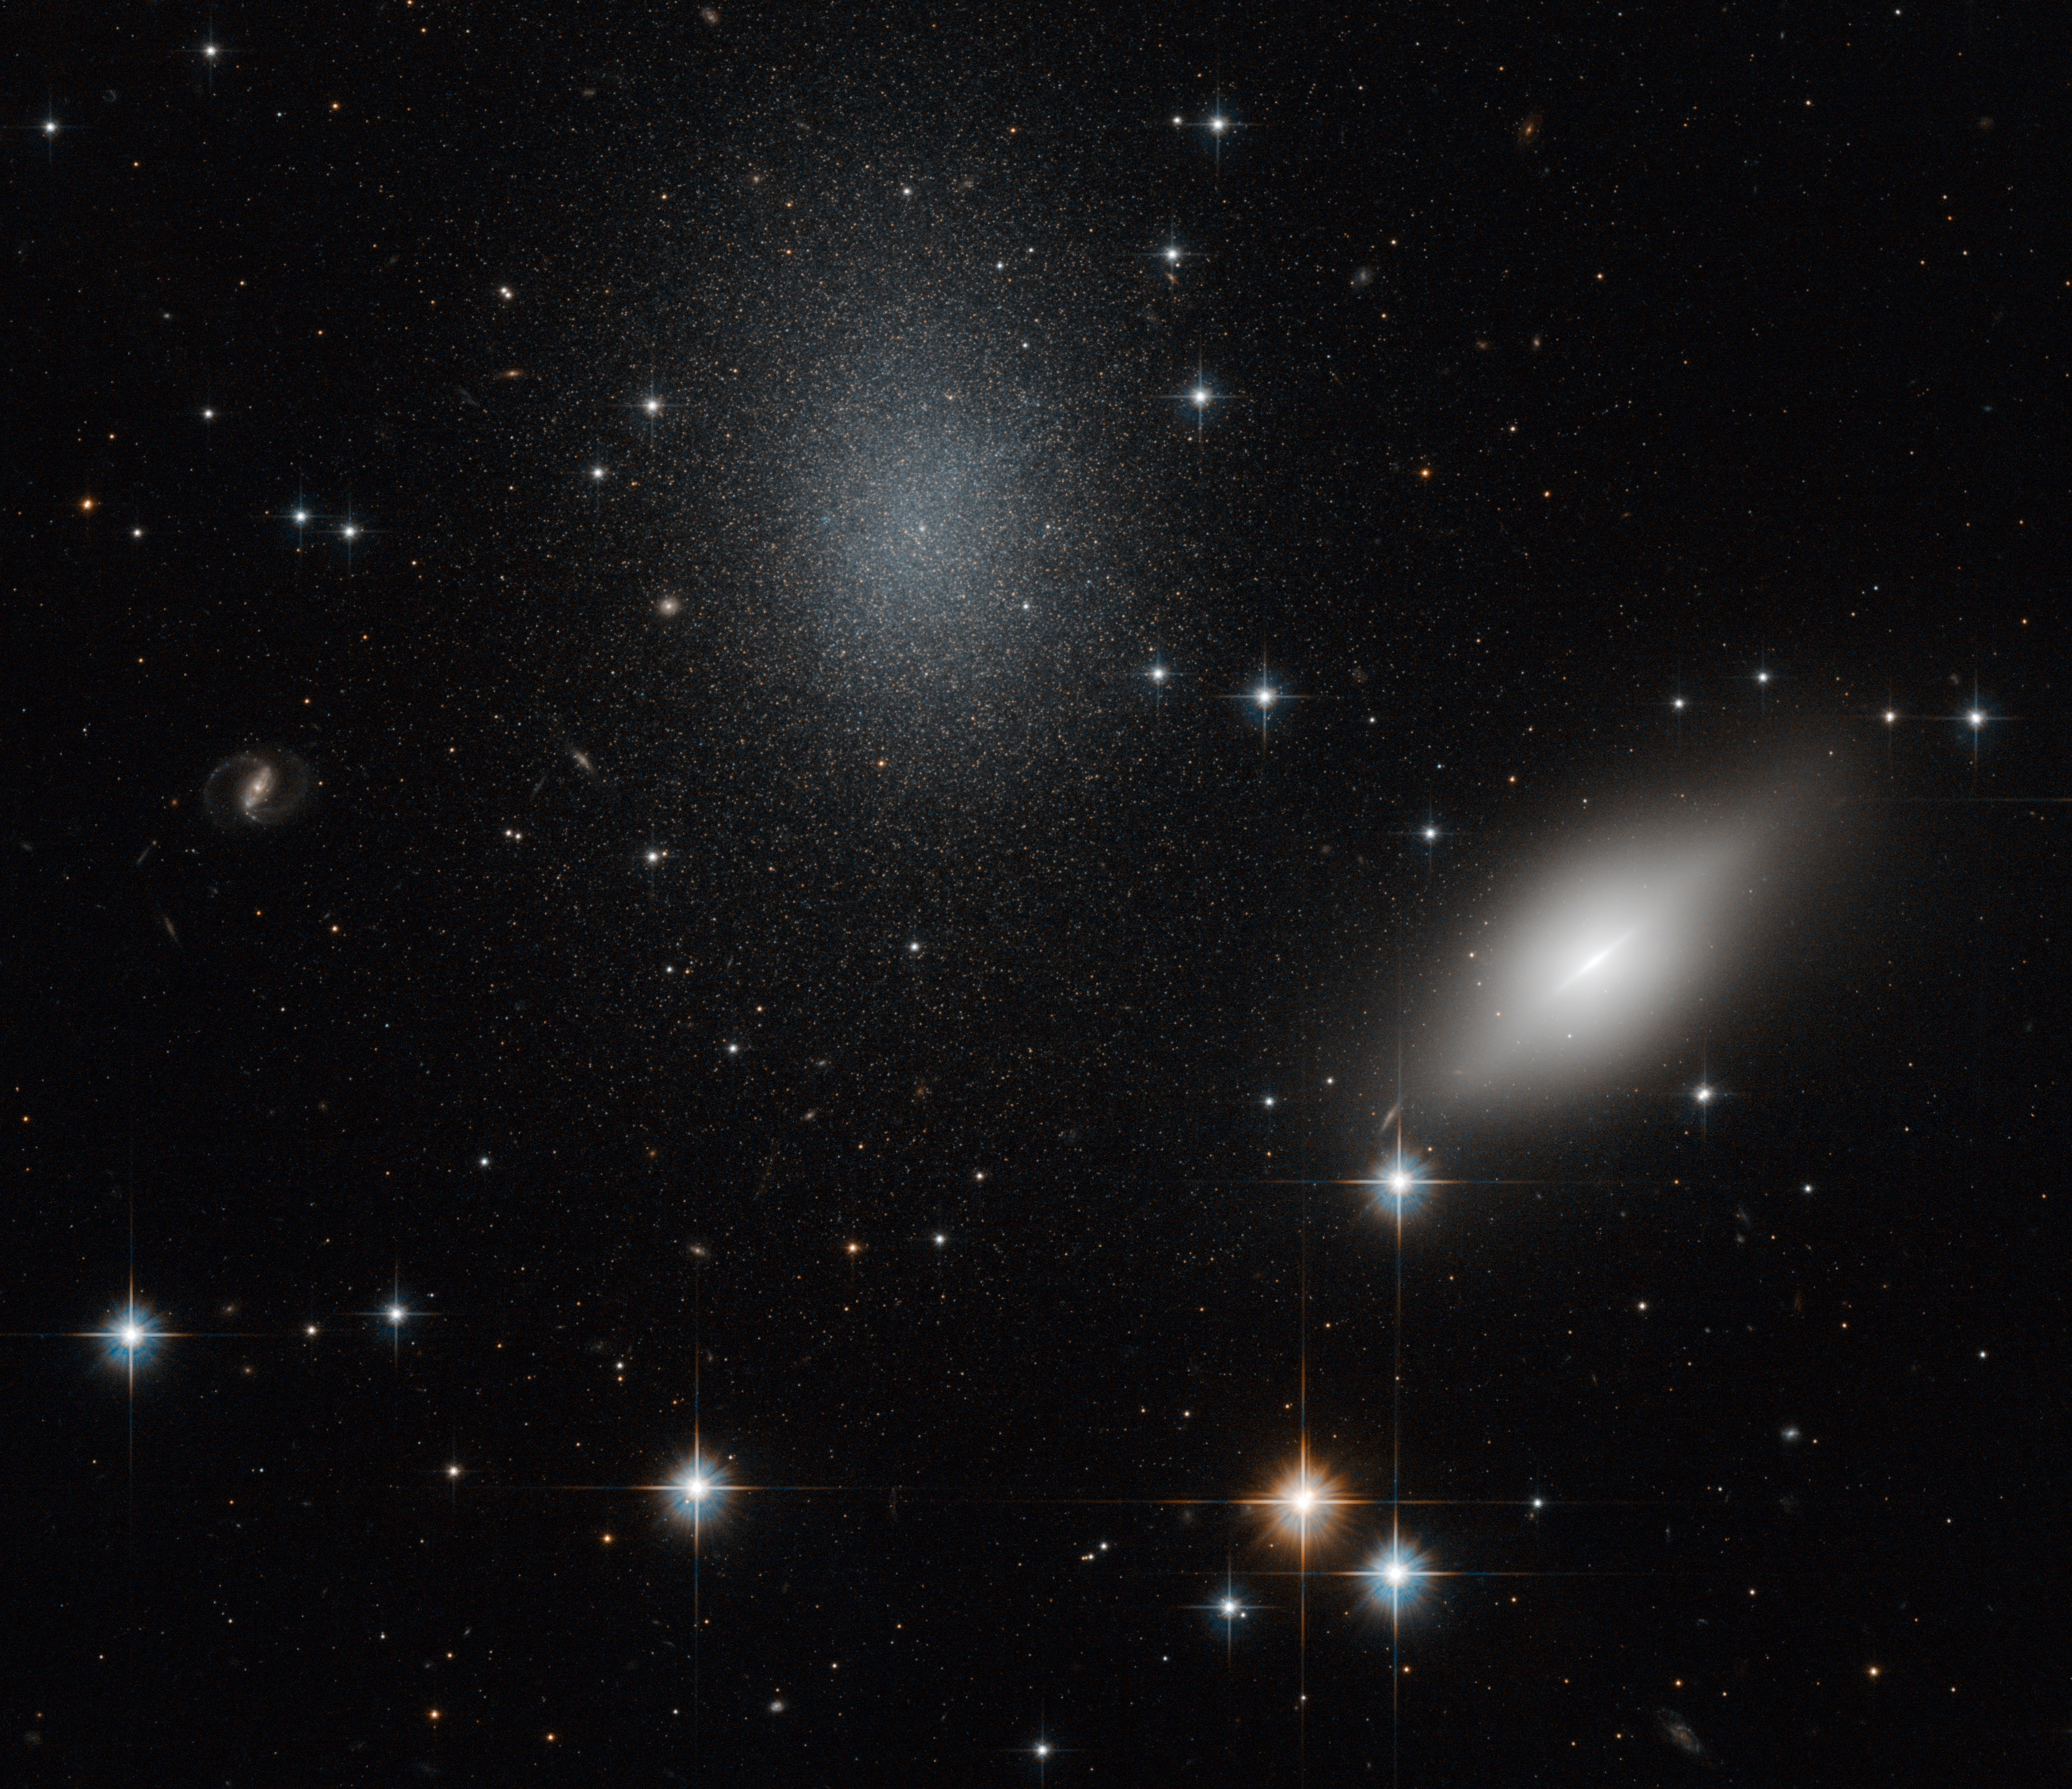

Don’t trust your eyes

The Universe loves to fool our eyes, giving the impression that celestial objects are located at the same distance from Earth. A good example can be seen in this spectacular image produced by the NASA/ESA Hubble Space Telescope. The galaxies NGC 5011B and NGC 5011C are imaged against a starry background.

Located in the constellation of Centaurus, the nature of these galaxies has puzzled astronomers. NGC 5011B (on the right) is a spiral galaxy belonging to the Centaurus Cluster of galaxies lying 156 million light-years away from the Earth. Long considered part of the faraway cluster of galaxies as well, NGC 5011C (the bluish galaxy at the centre of the image) is a peculiar object, with the faintness typical of a nearby dwarf galaxy, alongside the size of an early-type spiral.

Astronomers were curious about the appearance of NGC 5011C. If the two galaxies were at roughly the same distance from Earth, they would expect the pair to show signs of interactions between them. However, there was no visual sign of interaction between the two. How could this be possible?

To solve this problem, astronomers studied the velocity at which these galaxies are receding from the Milky Way and found that NGC 5011C is moving away far more slowly than its apparent neighbour, and its motion is more consistent with that of the nearby Centaurus A group at a distance of 13 million light-years. Thus, NGC 5011C, with only about ten million times the mass of the Sun in its stars, must indeed be a nearby dwarf galaxy rather than member of the distant Centaurus Cluster as was believed for many years.

Problem solved.

This image was taken with Hubble’s Advanced Camera for Surveys using visual and infrared filters.

Credit: ESA/Hubble & NASA